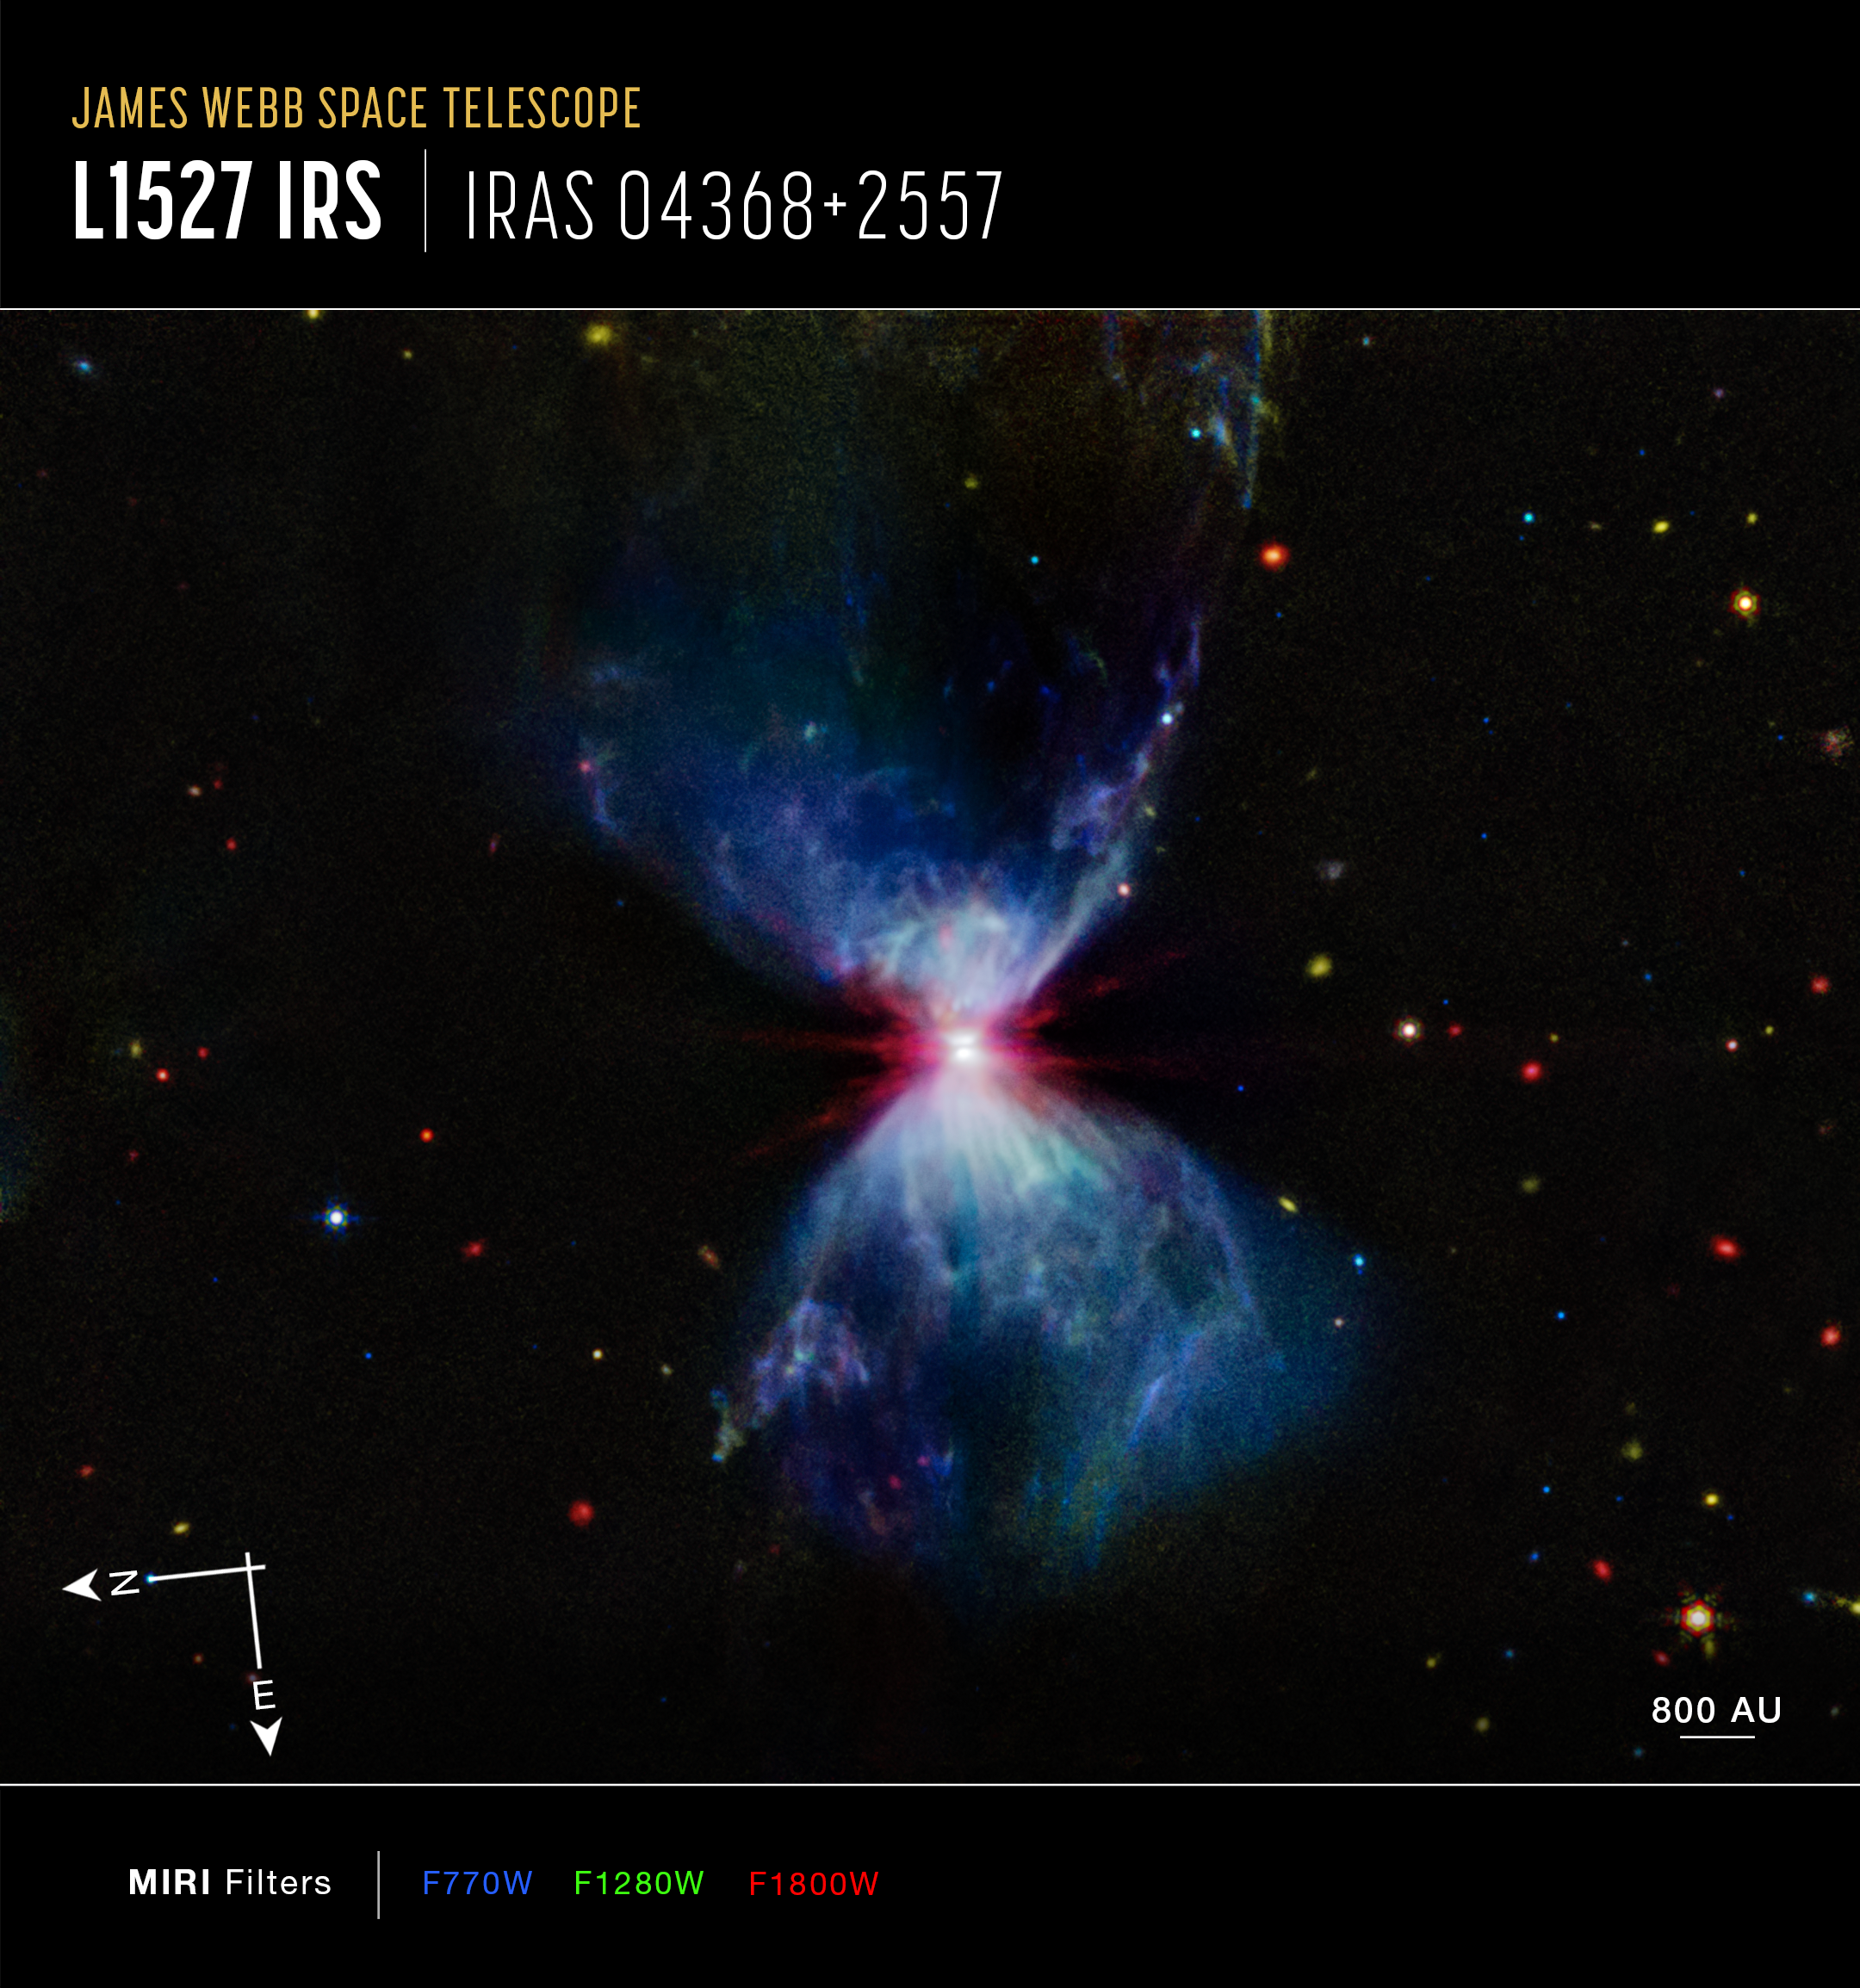

L1527 (MIRI image, annotated)

L1527, shown in this image from the NASA/ESA/CSA James Webb Space Telescope’s MIRI (Mid-Infrared Instrument), is a molecular cloud that harbors a protostar. It resides in the constellation Taurus, about 460 light-years from Earth. The more diffuse blue light and the filamentary structures in the image come from organic compounds known as polycyclic aromatic hydrocarbons (PAHs), while the red at the center of this image is an energized, thick layer of gases and dust that surrounds the protostar. The region in between, which shows up in white, is a mixture of PAHs, ionized gas, and other molecules.

As the protostar continues to age and release energetic jets, it’ll consume, destroy, and push away much of this molecular cloud, and many of the structures we see here will begin to fade. Eventually, once it finishes gathering mass, this impressive display will end, and the star itself will become more apparent, even to our visible-light telescopes.

This image includes filters representing 7.7 microns light as blue, 12.8 microns light as green, and 18 microns light as red.

Credit: NASA, ESA, CSA, STScI